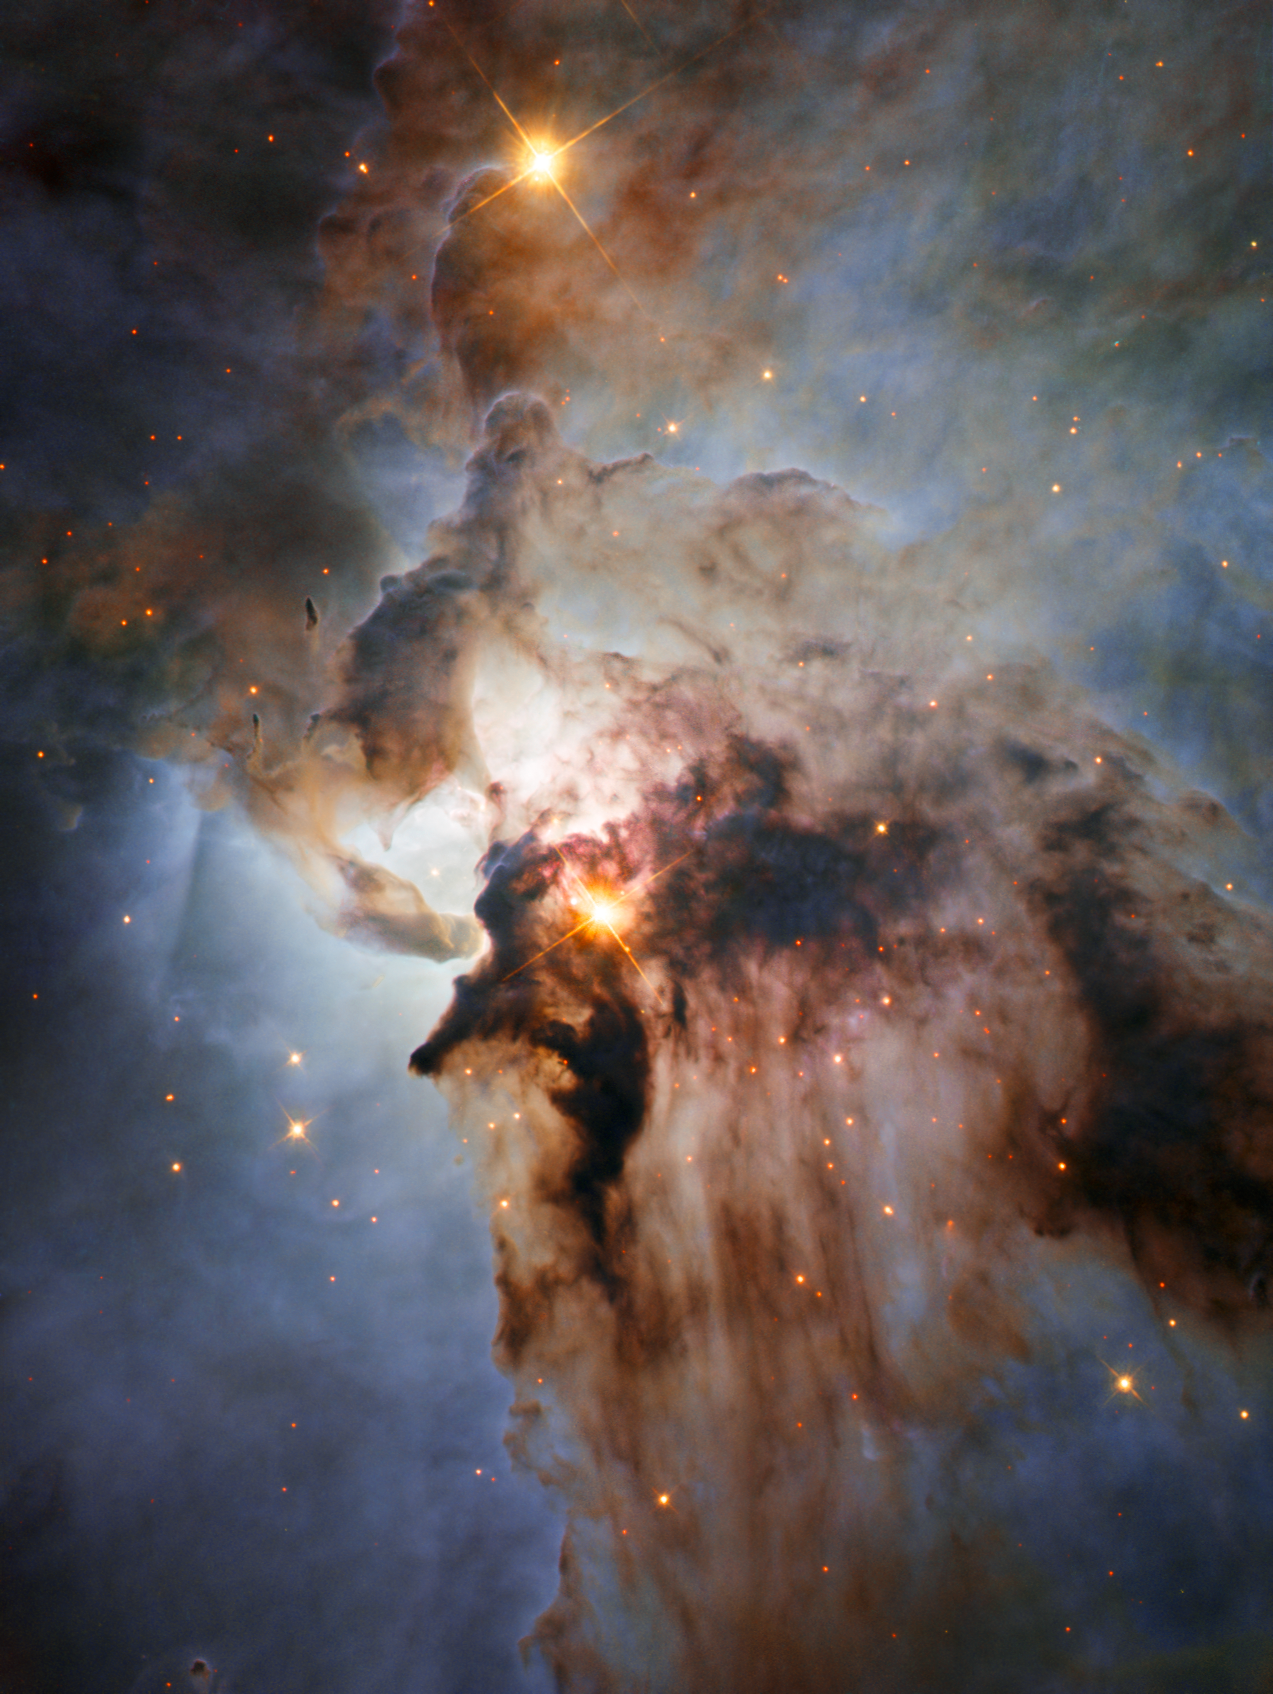

New Hubble view of the Lagoon Nebula

This new NASA/ESA Hubble Space Telescope image shows the Lagoon Nebula, an object with a deceptively tranquil name. The region is filled with intense winds from hot stars, churning funnels of gas, and energetic star formation, all embedded within an intricate haze of gas and pitch-dark dust.

Credit: NASA, ESA, J. Trauger (Jet Propulsion Laboratory)